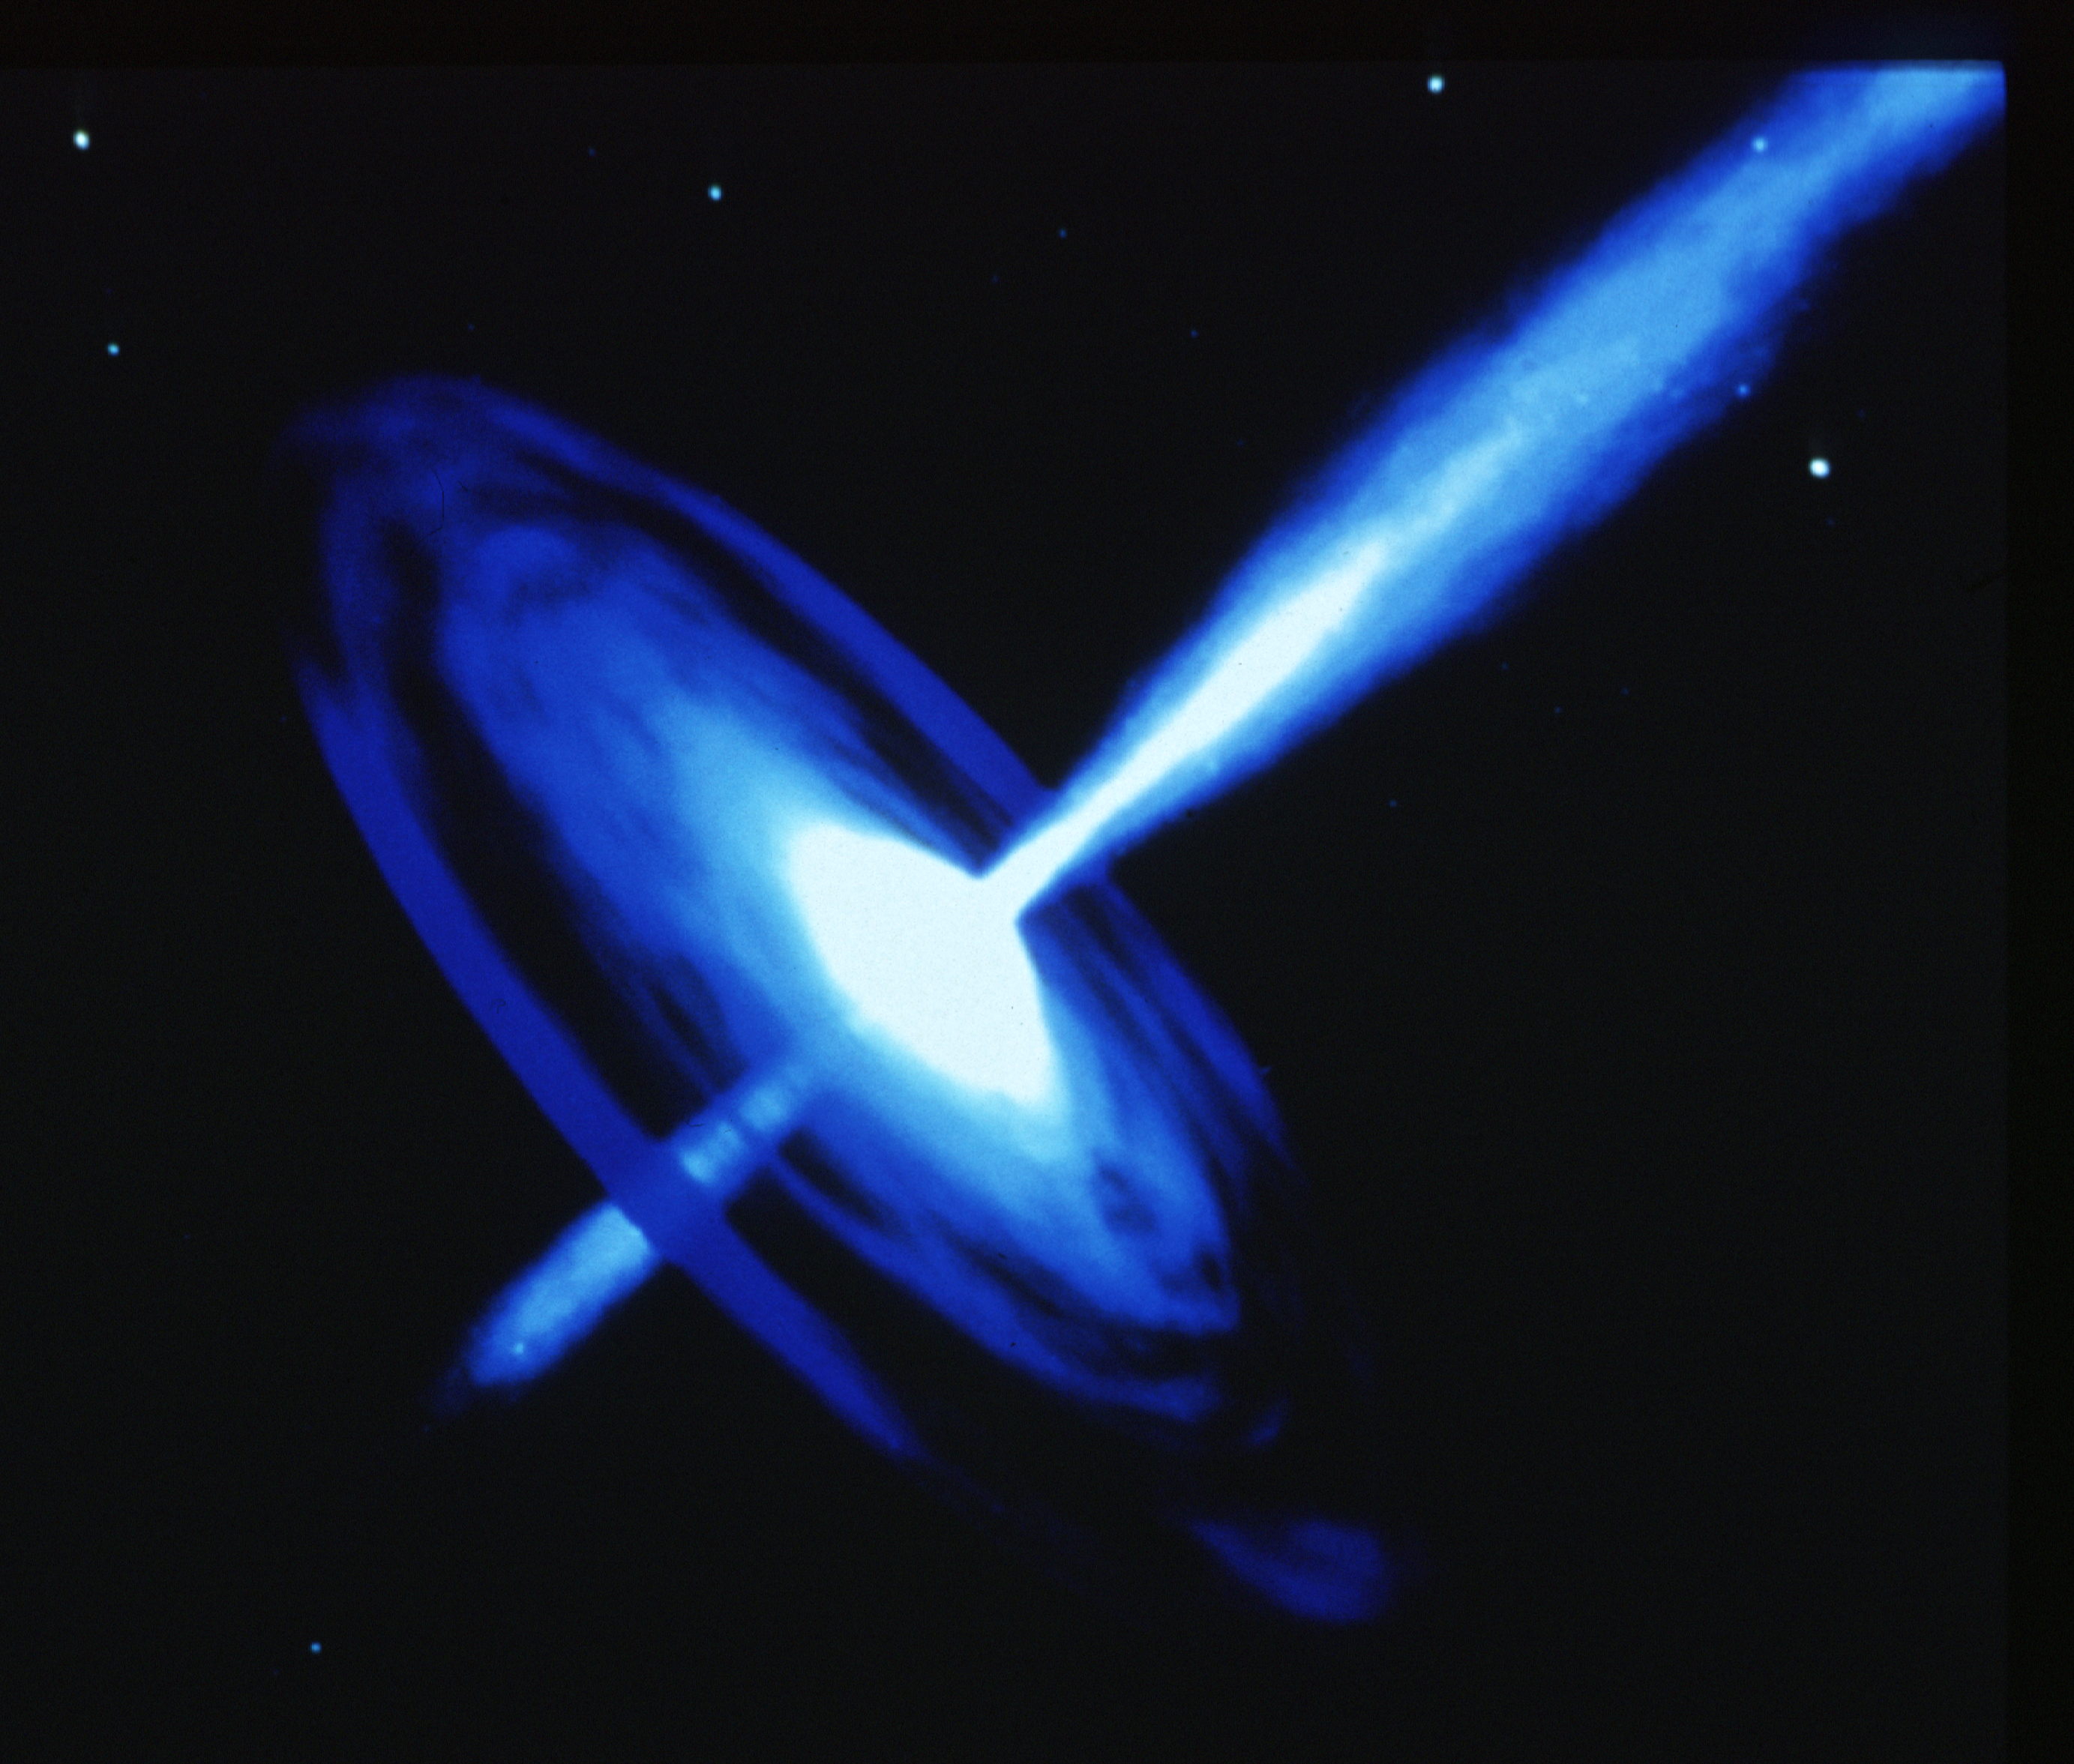

Galactic black hole with optical jet (artist's impression)

The energy source needed to create and maintain the galactic let in galaxy PKS 0521-36 is generated deep within the core of the galaxy, and is far too small to resolved. The favored mechanism behind these cosmic fireworks is a spinning, massive black hole. The hole is fueled by a continual in-fall of nearby gas and stars. This gravitational accretion process is far more efficient at converting mass to energy than thermonuclear fusion processes which power individual stars. The extraordinary high pressure and temperature generated near the hole would cause some of the in-falling gas to be ejected along the direction of the black hole's spinning axis to create the galactic let.

Credit: Dana Berry (STScI)